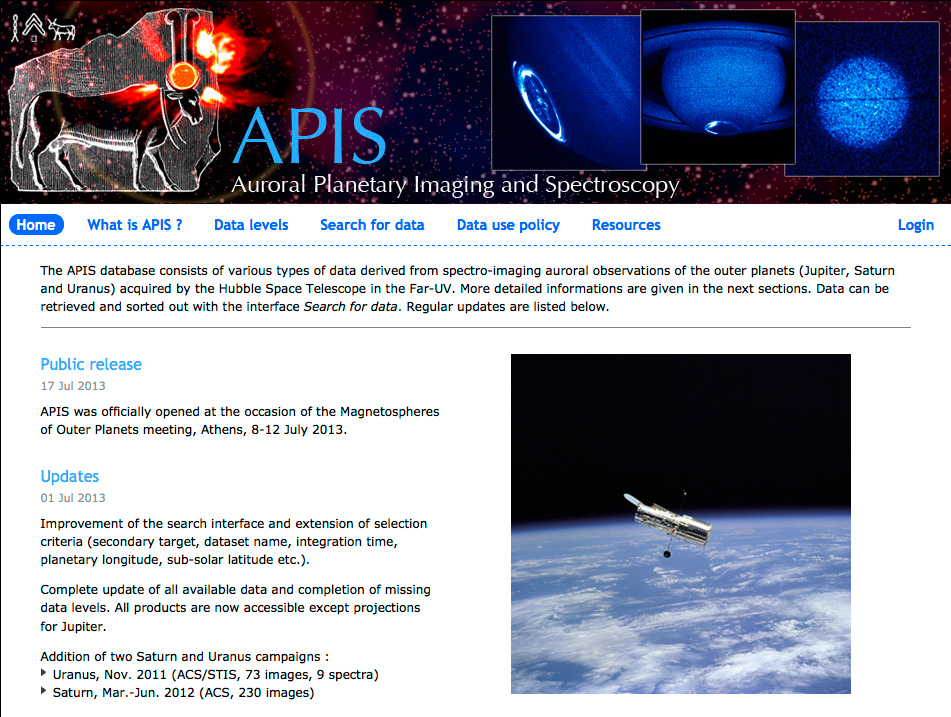

Screenshot of the APIS website

Screenshot of the APIS website.

Credit: NASA & ESA